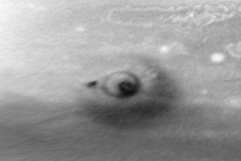

Evolution of D/G Impact Sites on Jupiter

This first image was taken about 90 minutes after the G impact on 18 July 1994. Nearly all of the structure in this image was created by the impact of fragment G, although a small dark spot to the left was the remainder of small fragment D that collided one day earlier.

Credit: H. Hammel, MIT and NASA/ESA